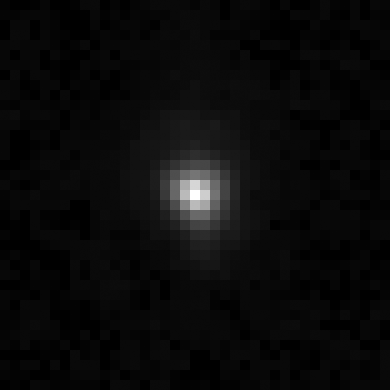

Kuiper belt object 2003 UB313

The NASA/ESA Hubble Space Telescope resolved Kuiper Belt object Xena, for the first time, and found that it is only just a little larger than Pluto.

Ground-based observations suggested that Xena was about 30 percent greater in diameter than Pluto, but Hubble's Advanced Camera for Surveys images, taken on Dec. 9 and 10, 2005, yielded a diameter of 1,490 miles with an uncertainty of 60 miles (or about 2400 kilometres with an uncertainty of 100 kilometres) for Xena. Pluto's diameter, as measured by Hubble, is 1,422 miles (about 2290 kilometres).

Credit: NASA, ESA, and M. Brown (California Institute of Technology)